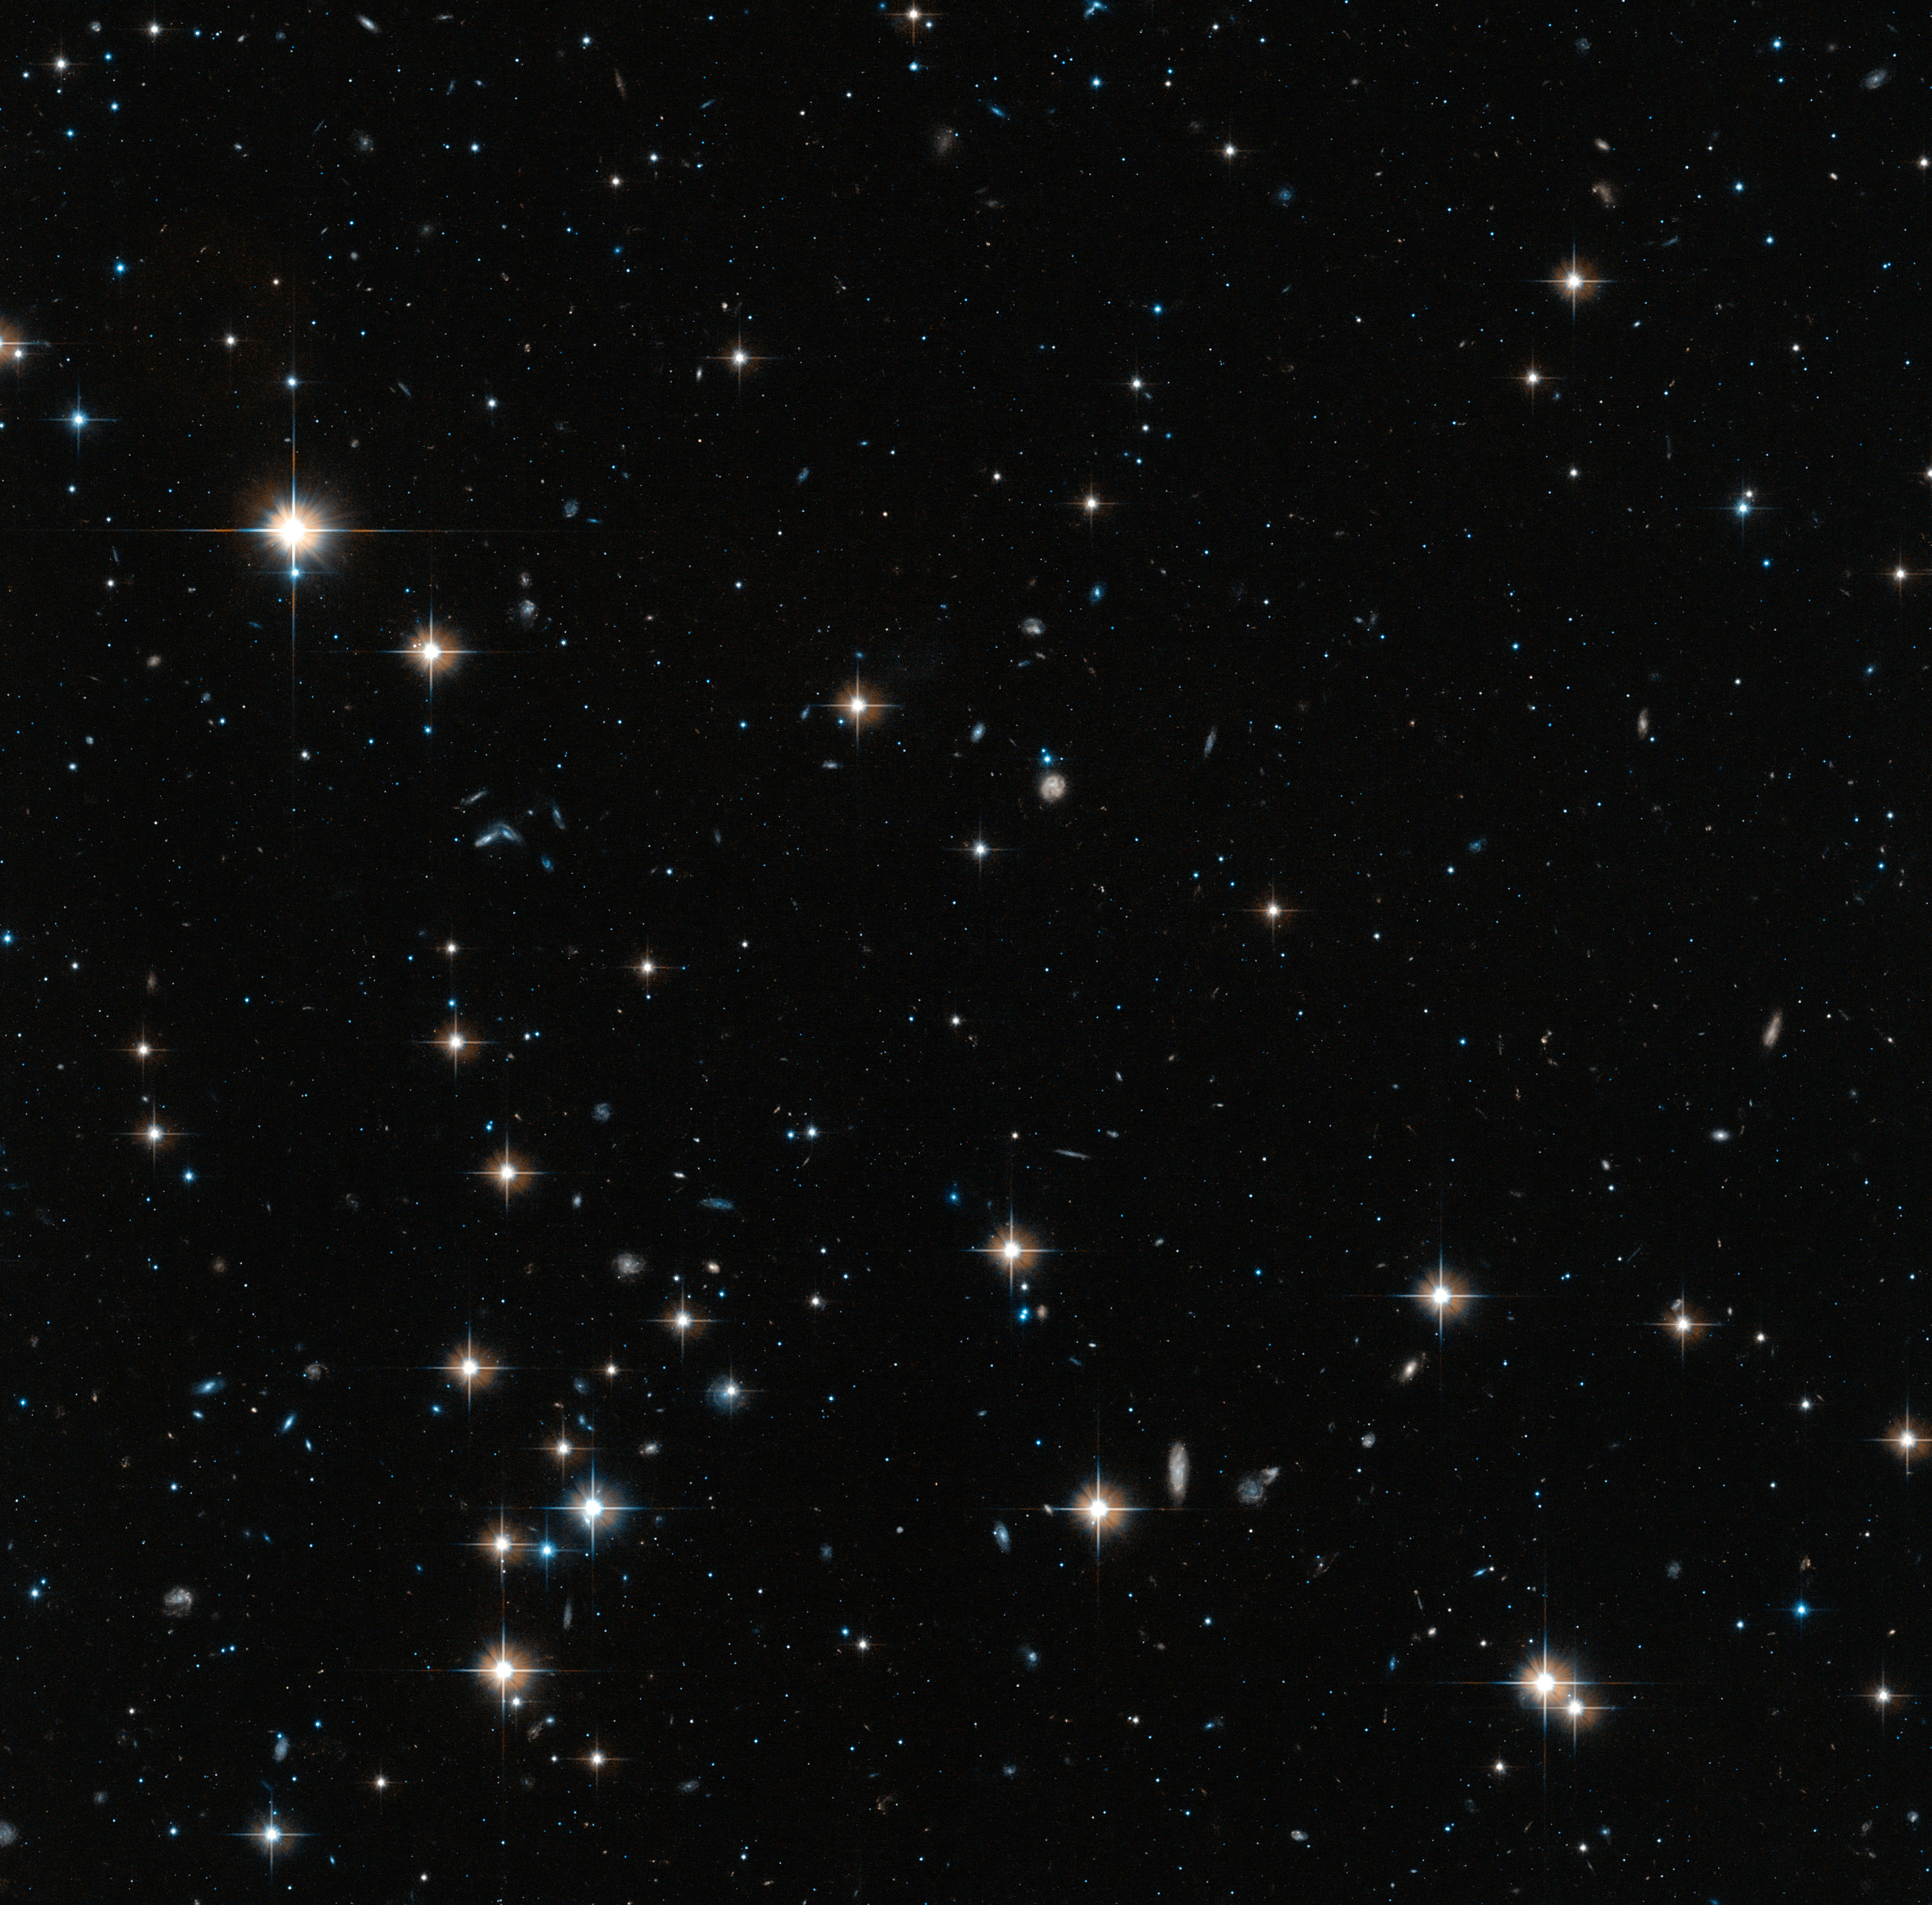

Area of Centaurus A halo probed by Hubble

This image shows one of the areas of Centaurus A's halo probed by the NASA/ESA Hubble Space Telescope's Advanced Camera for Surveys.

Hubble's unique capabilities allowed astronomers to analyse the faint stars in the halo, which can be seen in this image along with the brighter foreground stars in the Milky Way, and the much more distant background galaxies.

The larger context for this image can be found in the widefield annotated image of Centaurus A.

Credit: ESA/Hubble, NASA Acknowledgement: Marina Rejkuba (European Southern Observatory)